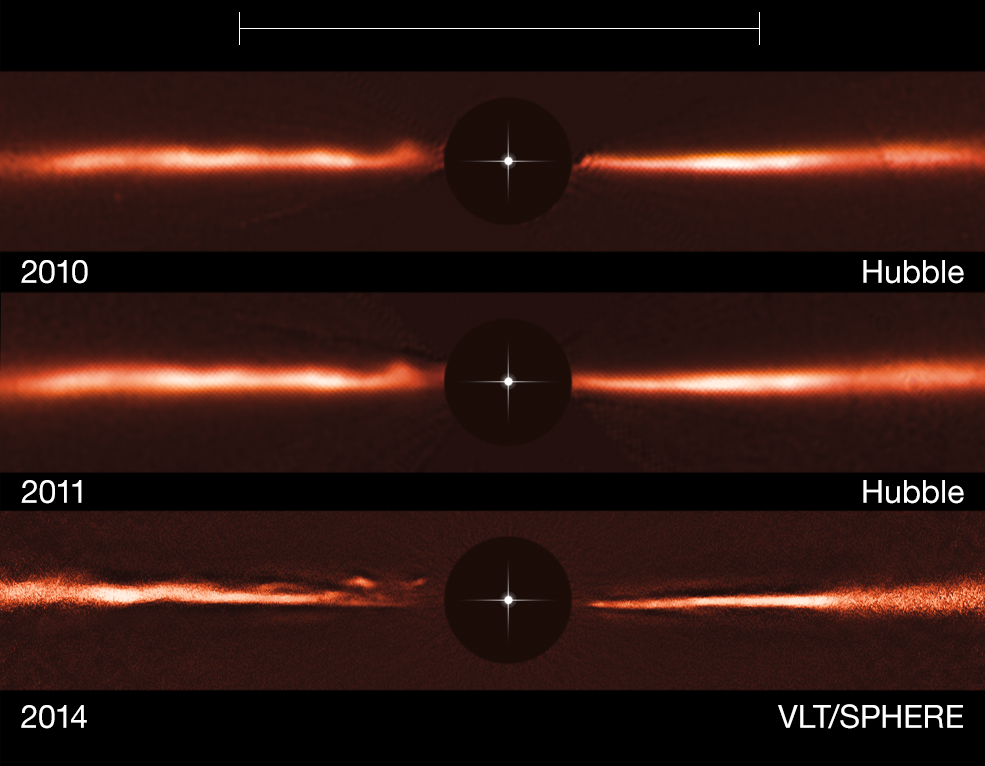

Hubble and VLT images of the disc around AU Microscopii

Using images from the NASA/ESA Hubble Space Telescope and ESO’s Very Large Telescope, astronomers have discovered fast-moving wave-like features in the dusty disc around the nearby star AU Microscopii. These odd structures are unlike anything ever observed, or even predicted, before now. The top row shows a Hubble image of the AU Mic disc from 2010, the middle row Hubble from 2011 and the bottom row is an image taken with the SPHERE instrument, mounted on the Very Large Telescope, from 2014. The black central circles show where the brilliant light of the central star has been blocked off to reveal the much fainter disc, and the position of the star is indicated schematically.

Credit: ESO, NASA & ESA